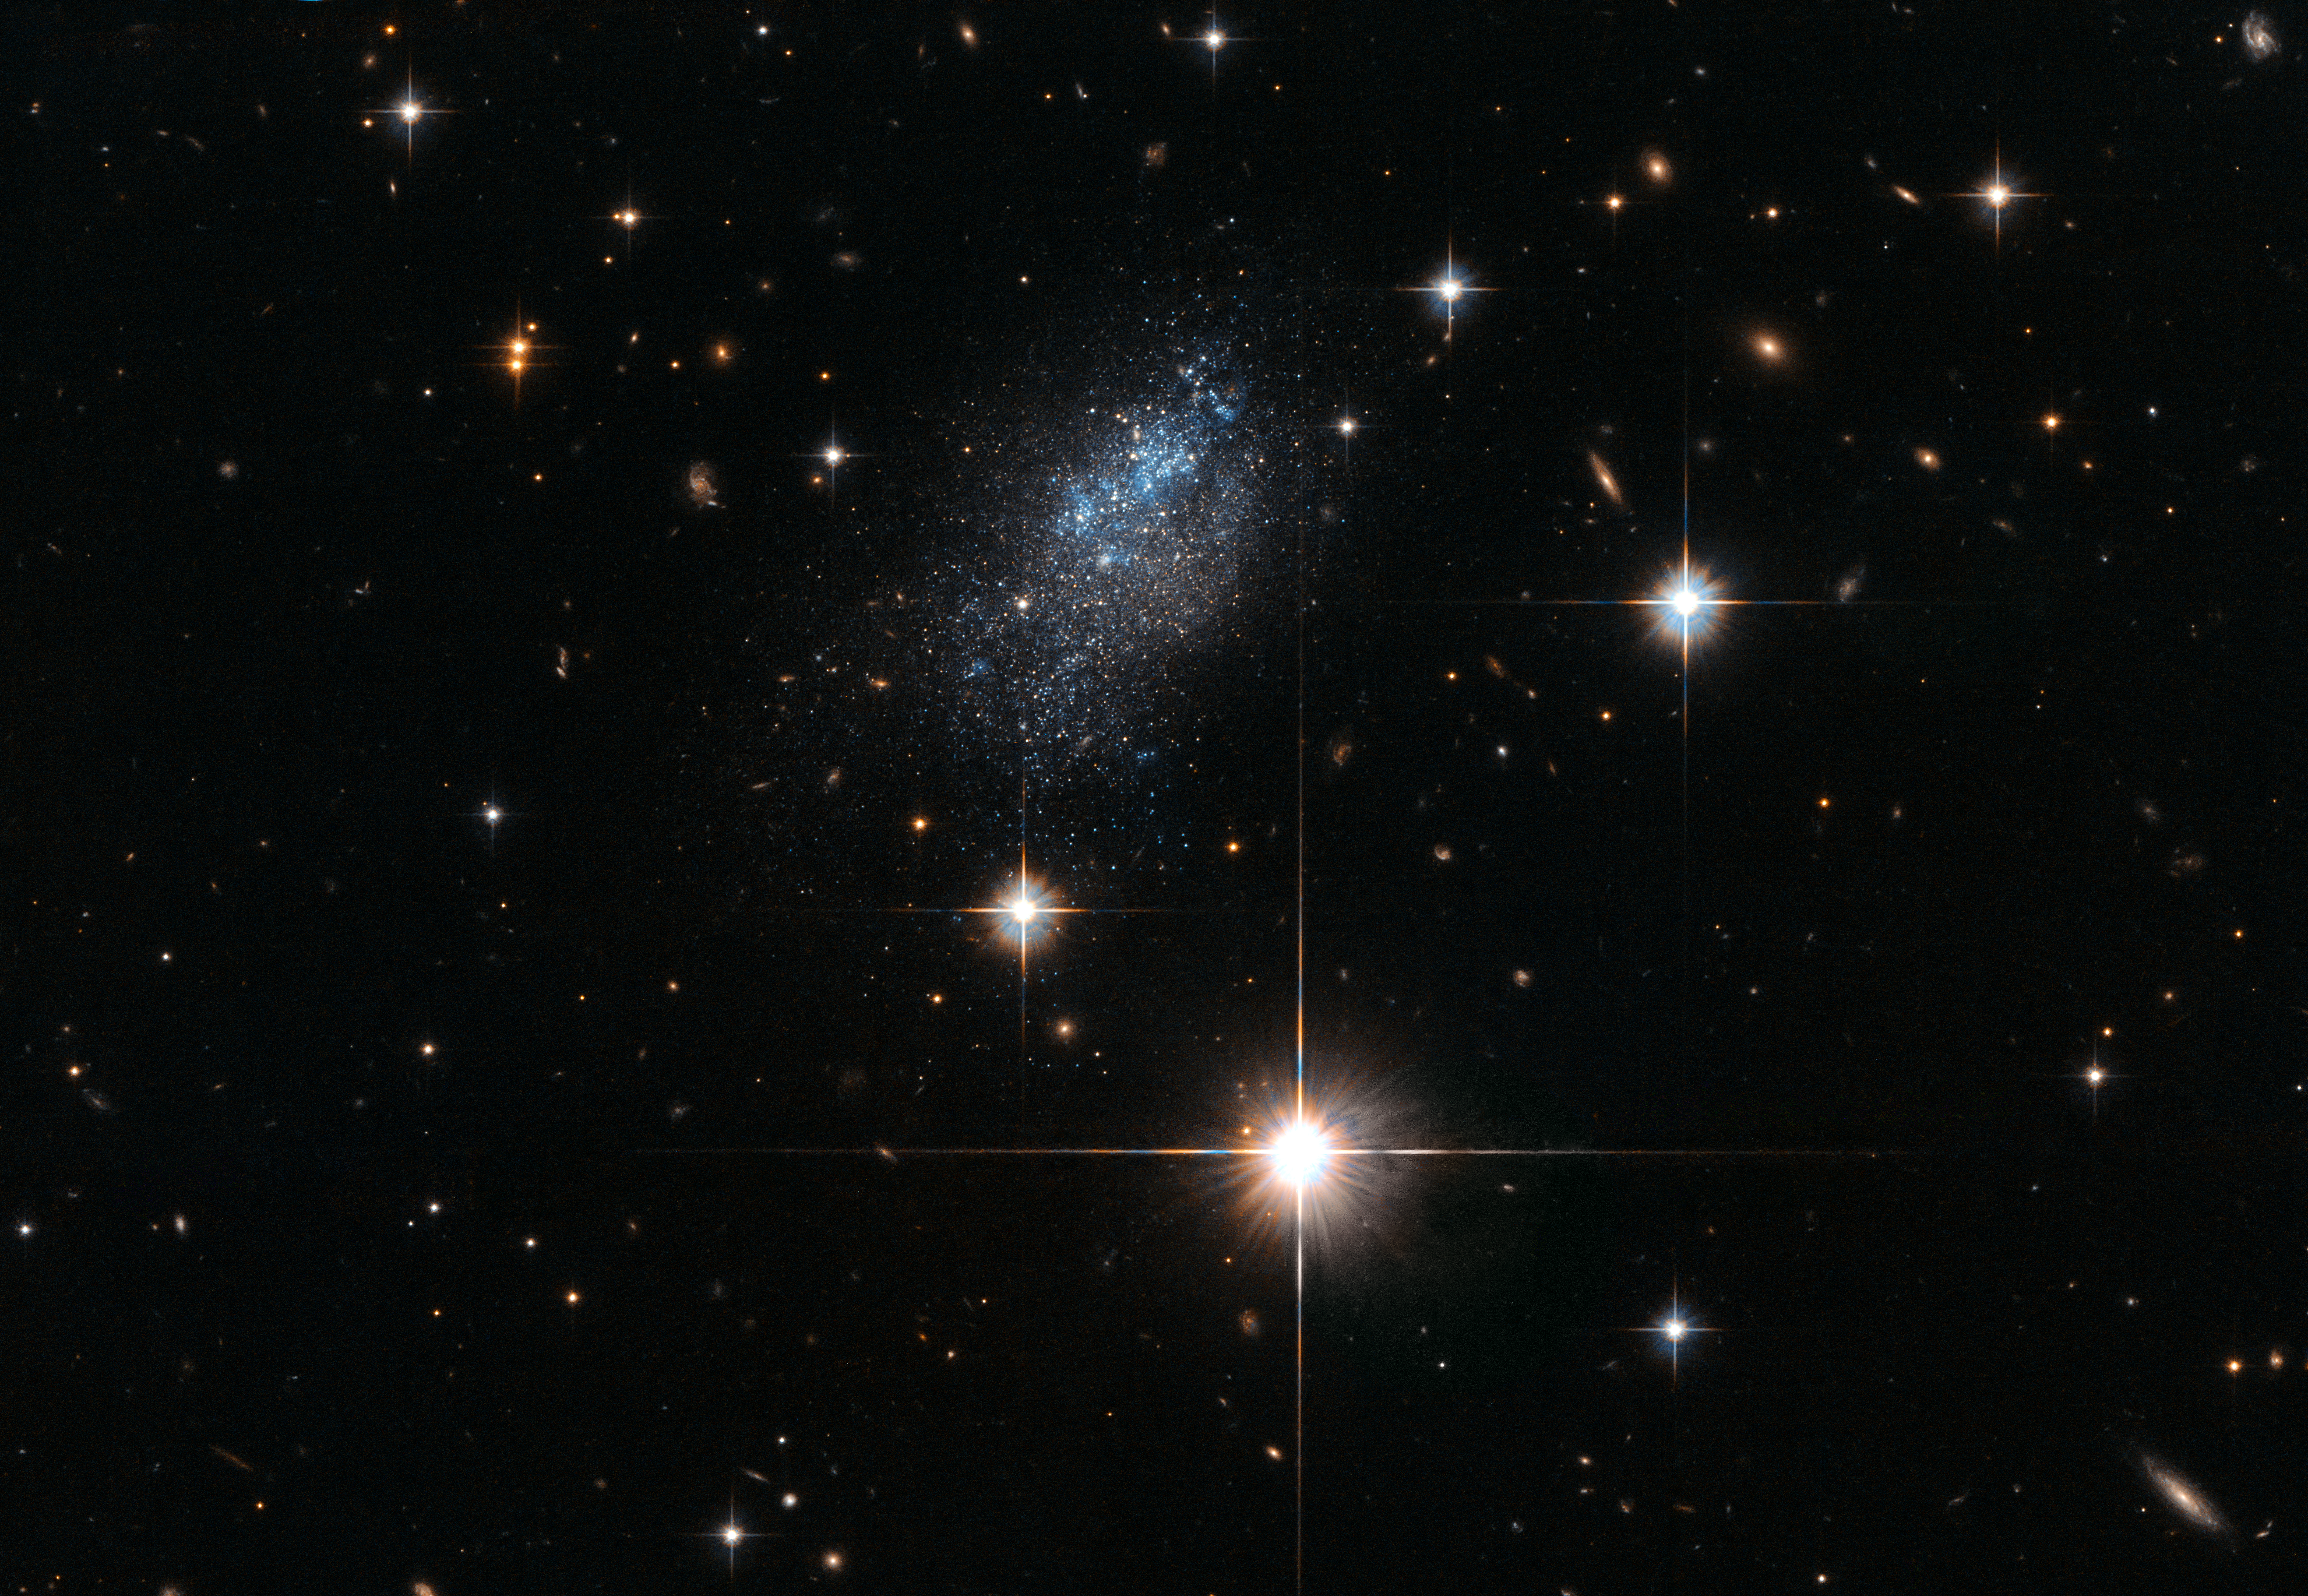

Mapping the nearby Universe

The distances to objects in the Universe can differ enormously. The nearest star to us — Proxima Centauri — lies some 4.2 light-years from us, while some incredibly distant galaxies are so far away — 13 billion light-years or more — that they are only visible to us as a result of cosmic tricks of magnification.

The subject of this image, a galaxy called ESO 376-16, sits nearly 23 million light-years from Earth — not that great a distance on a cosmic scale. However, given the galaxy’s relative proximity to us, we know surprisingly little about it. Astronomers are still debating about many of the properties of ESO 376-16, including its morphology. Galaxies are divided into types based on their visual appearance and characteristics; spiral galaxies, like the Milky Way, are flattened discs with curved arms sweeping out from a central nucleus, while irregular galaxies lack a distinct structure and look far more chaotic. On the basis of its rather ill-defined morphology, ESO 376-16 is thought to be either a late-type spiral or a dwarf irregular galaxy.

Despite its mystique, observations of ESO 376-16 have been useful in several studies, including one made with the NASA/ESA Hubble Space Telescope that aimed to create a 3D map of galaxies lying in the vicinity of Earth. Researchers used Hubble to gauge the distance to galaxies including ESO 376-16 by measuring the luminosities of especially bright red-giant-branch stars sitting within the galaxies. They then used their data to generate and calibrate 3D maps of the distribution of galaxies throughout the nearby cosmos.

Credit: ESA/Hubble & NASA